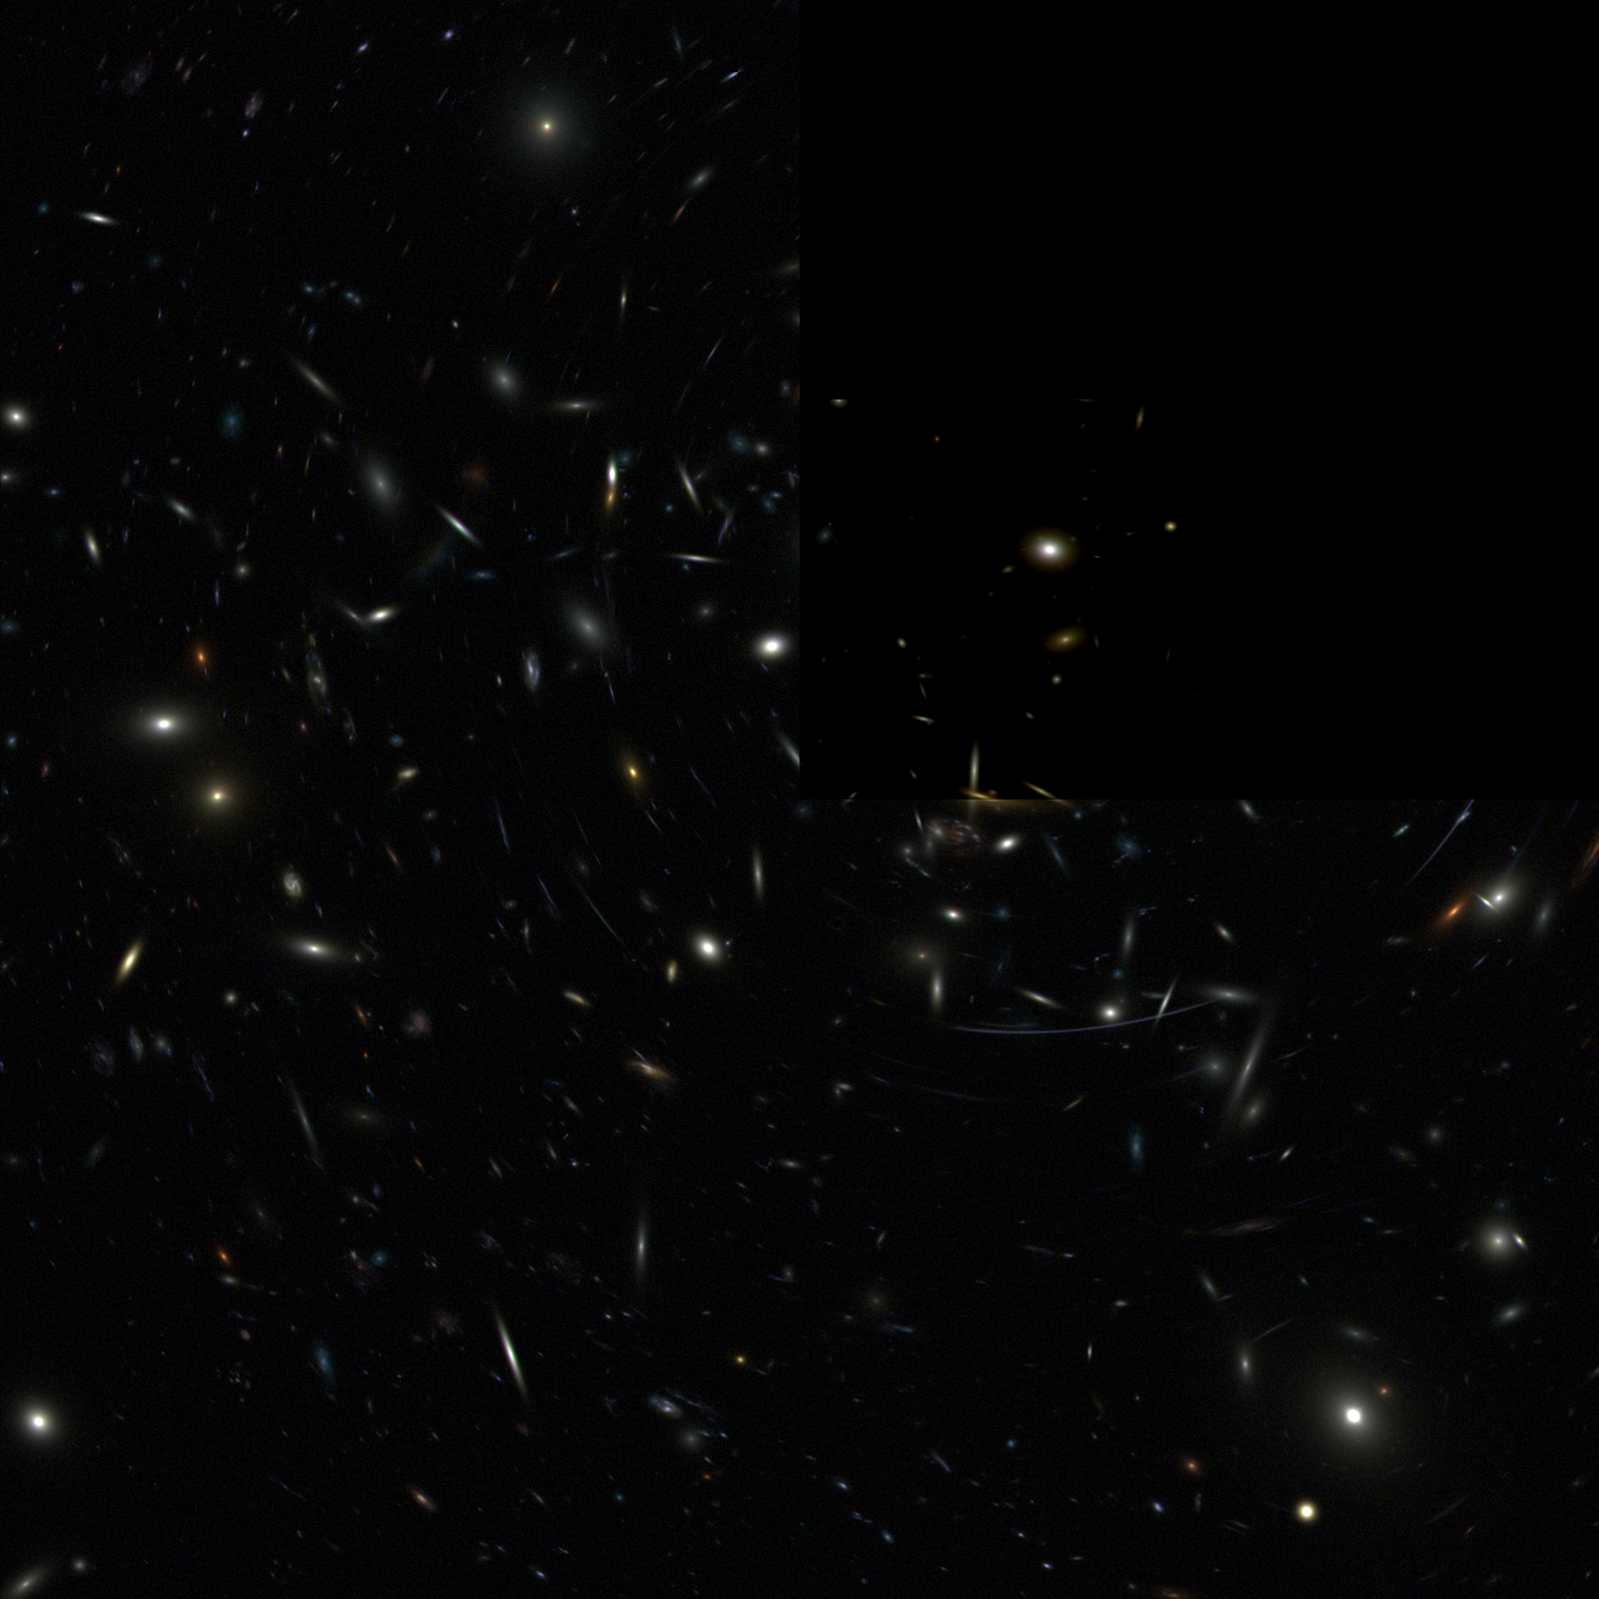

Advanced camera for surveys (ground-based image)

The Wide Field and Planetary Camera 2 provided the scientific community with astounding images and results. With the new Advanced Camera for Surveys (ACS) scientists are expecting to see even greater results that can help us to get a better understanding of the young Universe.

Credit: NASA/ESA and the ACS Science Team